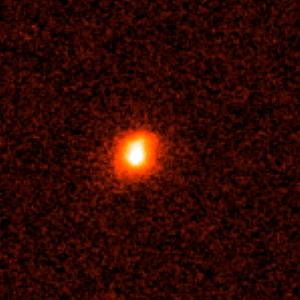

Gamma-ray burst host galaxy GRB980703

This is an image of Gamma-ray Burst Host Galaxy GRB980703. Long-duration gamma-ray bursts are powerful flashes of high-energy radiation that are sometimes seen coming from supernovae — the explosions of extremely massive stars. This image is one of a set of images taken by NASA’s Hubble Space Telescope which show the galaxies that host these bursts and could help to tell us more about their cause.

Credit: NASA, ESA, A. Fruchter (STScI), and the GOSH Collaboration